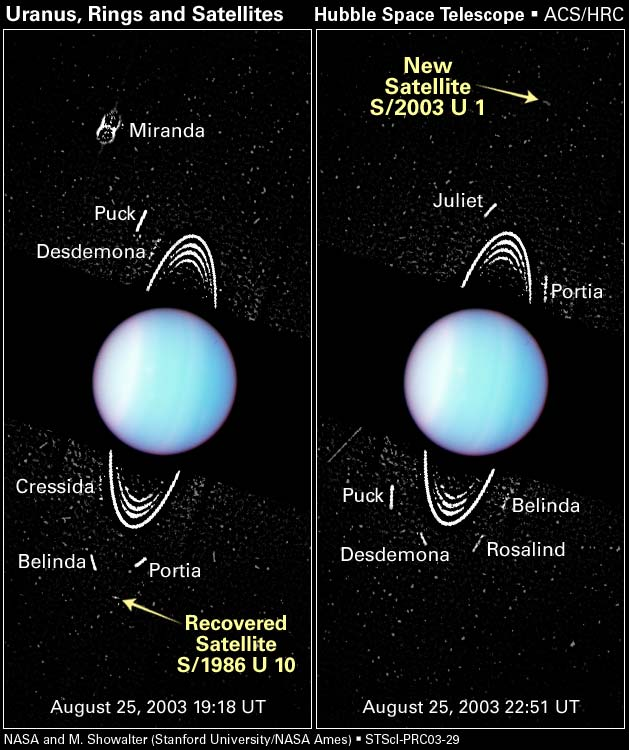

Hubble Spies Tiny Moons Circling Uranus

These images, taken with the NASA/ESA Hubble Space Telescope's Advanced Camera for Surveys (ACS), show several faint moons circling Uranus, including a newly detected moon and a rediscovered satellite. The planet's ring system can also be seen.

The arrow in the frame at right points to one of two newly discovered moons, among the smallest moons yet found around Uranus. The moon is temporarily designated as S/2003 U 1 until the International Astronomical Union (IAU) formally approves its discovery. S/2003 U 1 is orbiting 60,600 miles (97,700 km) away from the planet. If the satellite is as dark as Uranus's other moons, it is 10 miles (16 km) across, about the size of San Francisco. The Hubble telescope spotted this moon orbiting between the moons Puck, the largest satellite found by Voyager, and Miranda, the innermost of the five largest Uranian satellites. Astronomers previously thought this region was empty space. S/2003 U 1 whirls around the gas giant planet in 22 hours and 9 minutes.

Credit: NASA/ESA, M. Showalter (Stanford University/NASA/ESA Ames Research Center), J. Lissauer (NASA/ESA Ames Research Center)